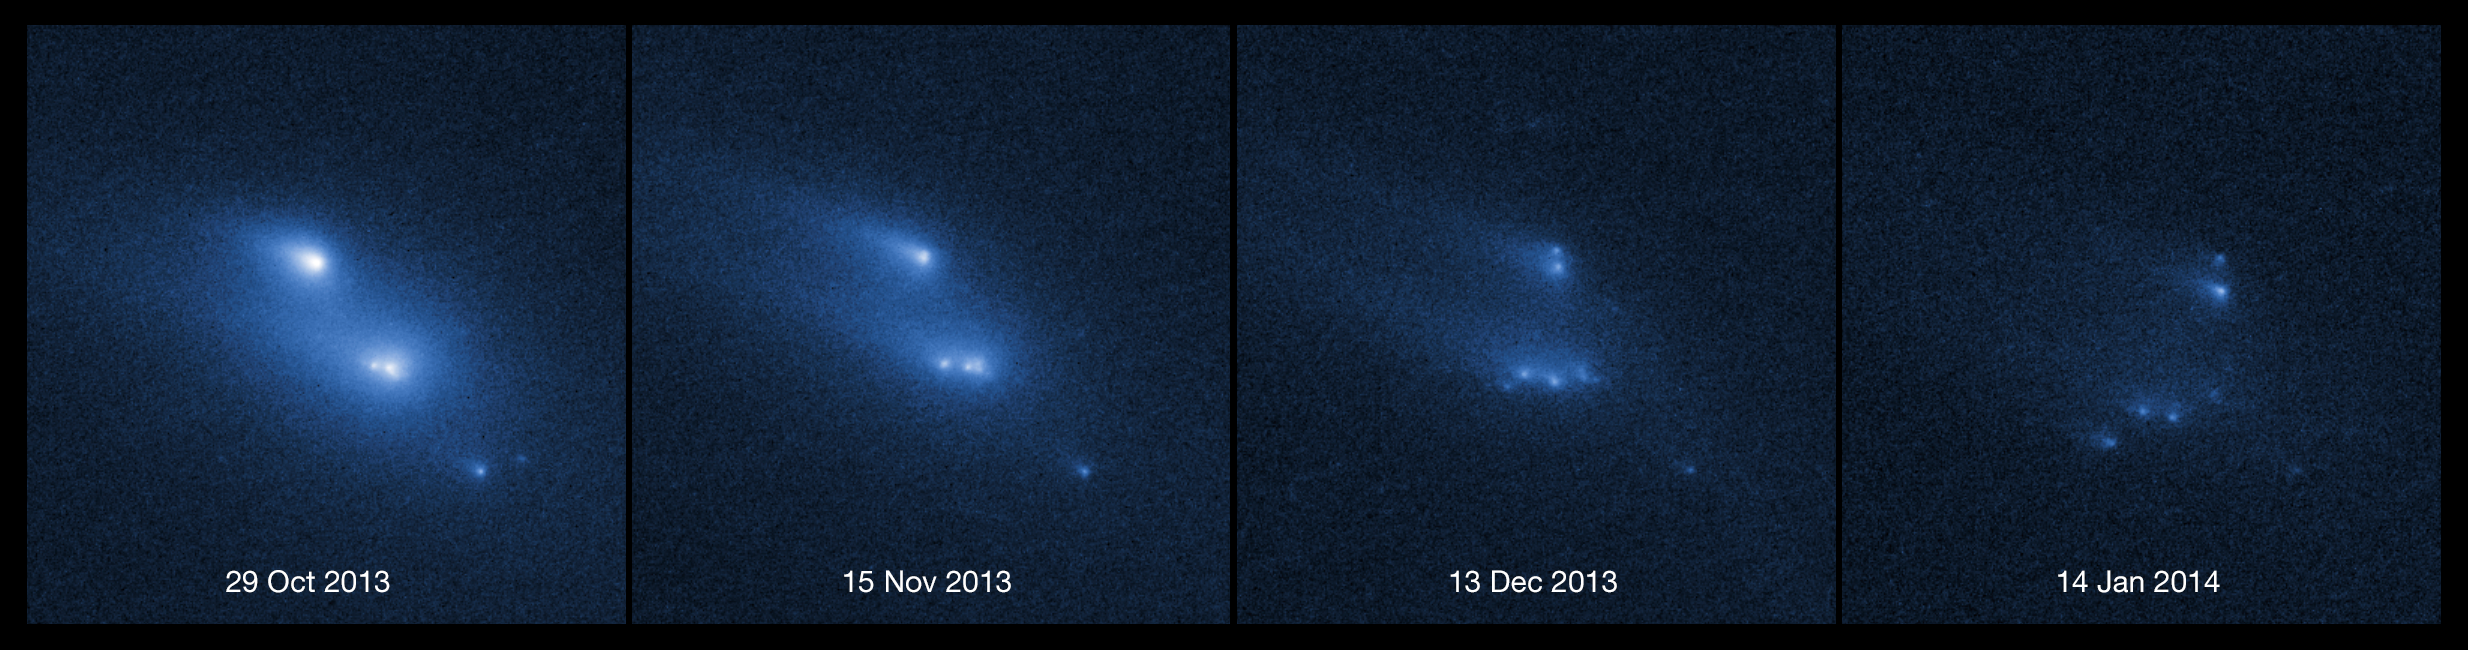

Asteroid P/2013 R3 breaks apart (labelled)

This series of images shows the asteroid P/2013 R3 breaking apart, as viewed by the NASA/ESA Hubble Space Telescope in 2013. This is the first time that such a body has been seen to undergo this kind of break-up.

The Hubble observations showed that there are ten distinct objects, each with comet-like dust tails, embedded within the asteroid's dusty envelope. The four largest rocky fragments are up to 200 metres in radius, about twice the length of a football pitch.

The dates on which the various observations were taken are marked at the bottom of each image, with frames from 29 October 2013, 15 November 2013, 13 December 2013, and 14 January 2014 respectively. The 14 January 2014 frame was not included in the science paper and is additional data.

Credit: NASA, ESA, D. Jewitt (UCLA)